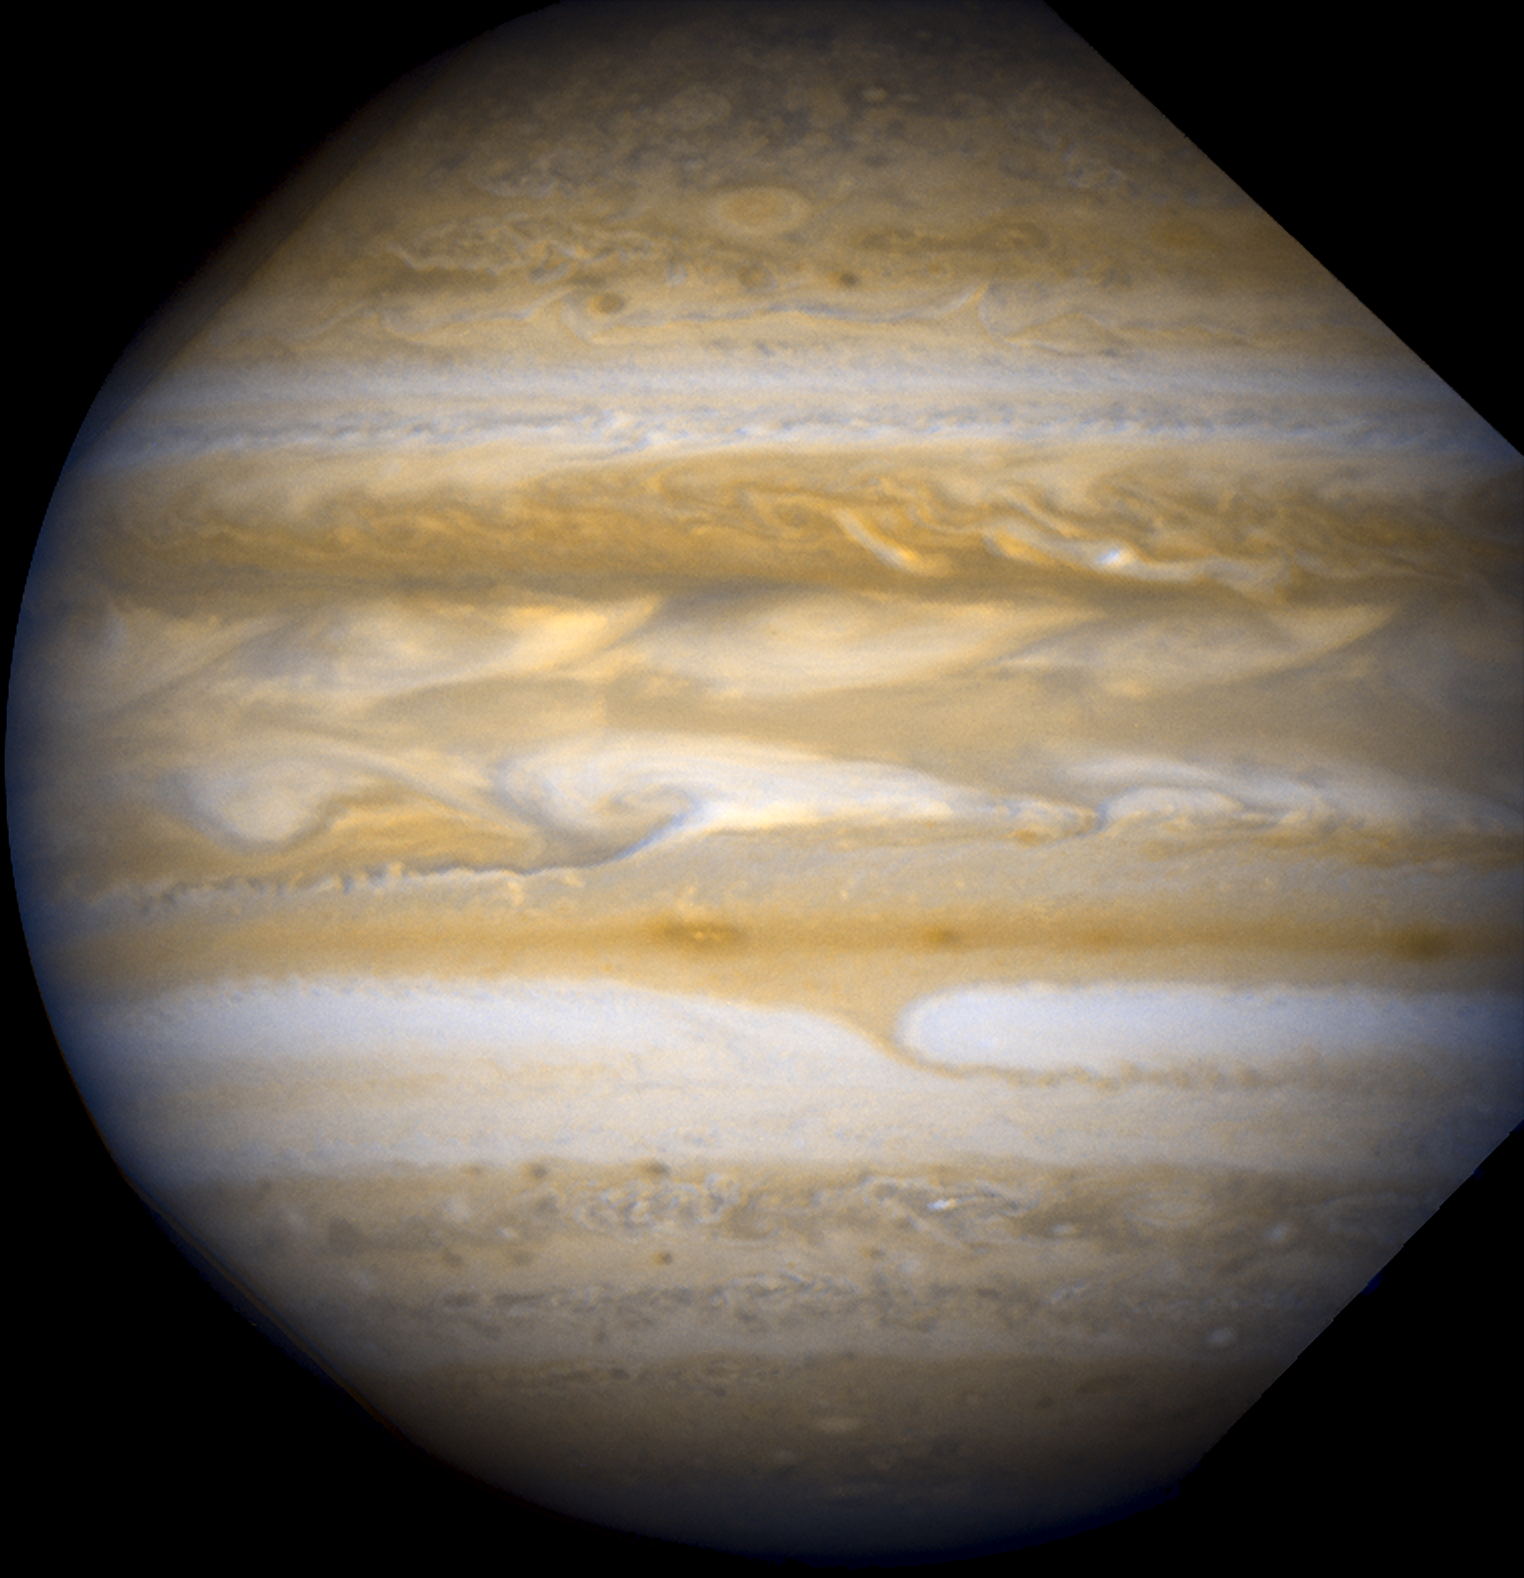

Jupiter - March 25, 2007 (Full Field)

Full field image of Jupiter taken with WFPC2 on March 25, 2007.

Credit: NASA, ESA, and A. Simon-Miller (NASA Goddard Space Flight Center)